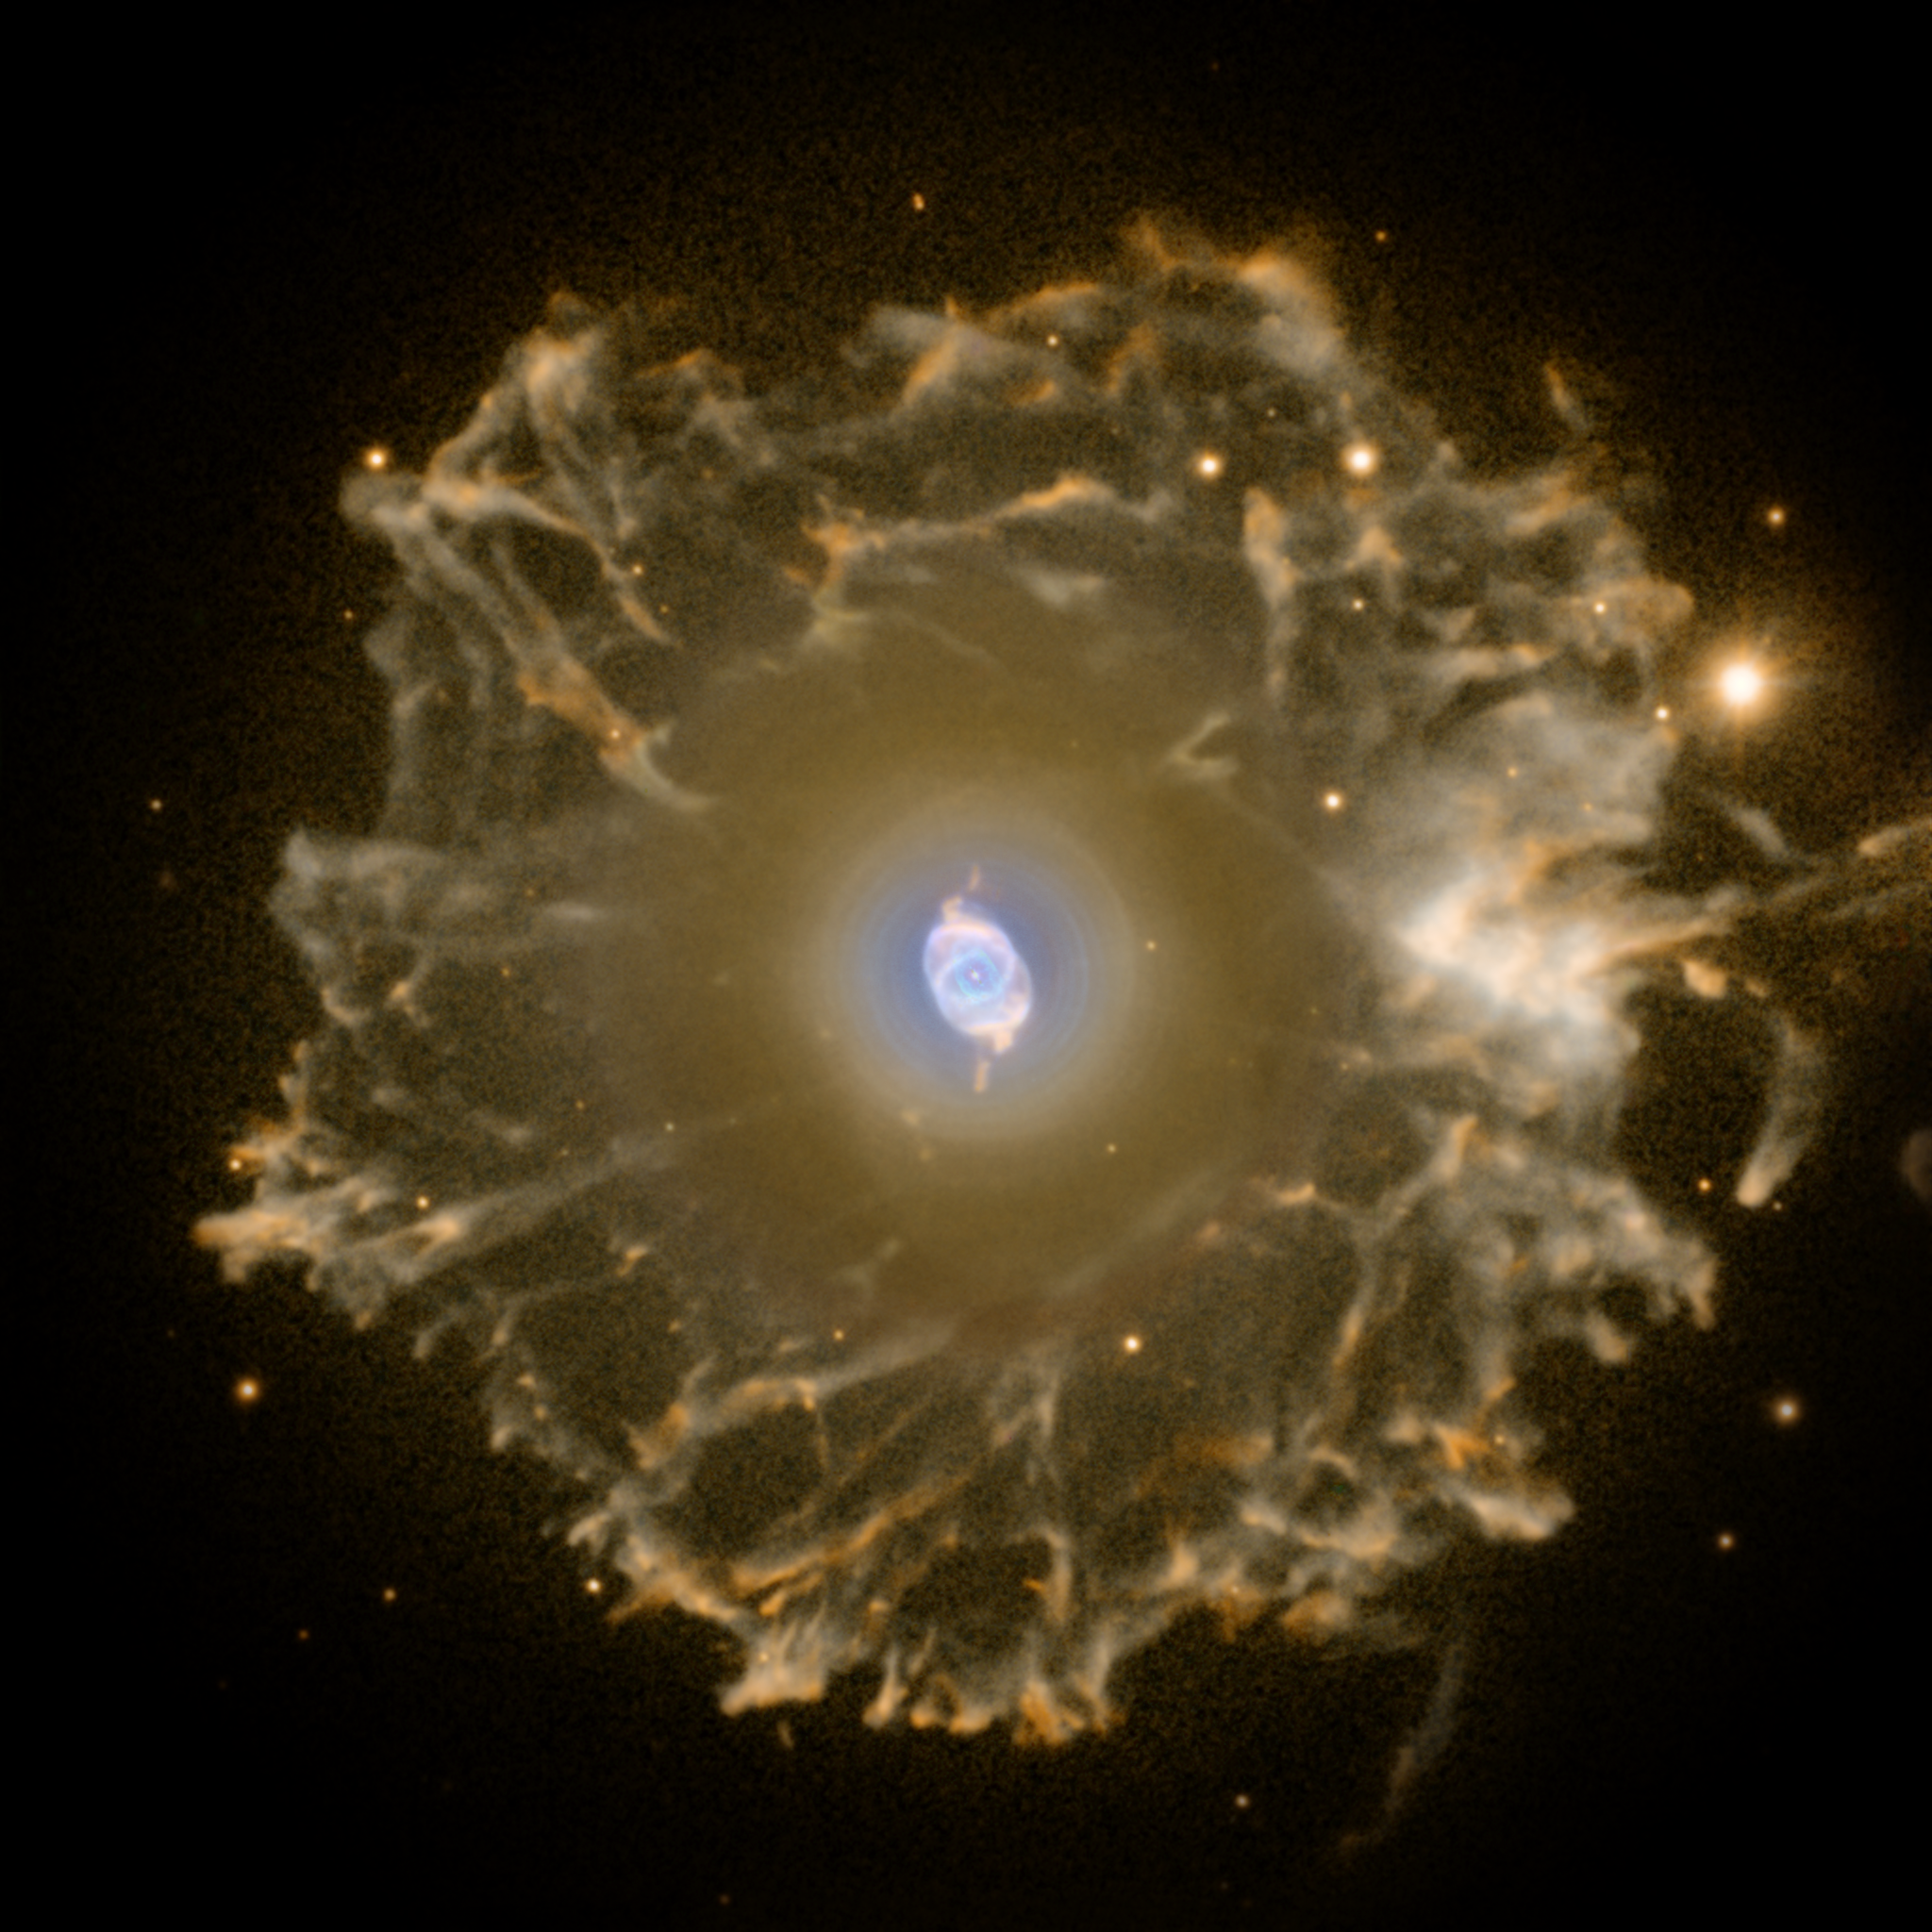

The Cat's Eye Nebula imaged with the Nordic Optical Telescope

An enormous but extremely faint halo of gaseous material surrounds the Cat's Eye Nebula and is over three light-years across. Within the past years some planetary nebulae been found to have halos like this one, likely formed of material ejected during earlier active episodes in the star's evolution - most likely some 50,000 to 90,000 years ago.

This image was taken by Romano Corradi with the Nordic Optical Telescope on La Palma in the Canary Islands. The image is constructed from two narrow-band exposures showing oxygen atoms (1800 seconds, in blue) and nitrogen atoms (1800 seconds, in red).

Credit: Nordic Optical Telescope and Romano Corradi (Isaac Newton Group of Telescopes, Spain)